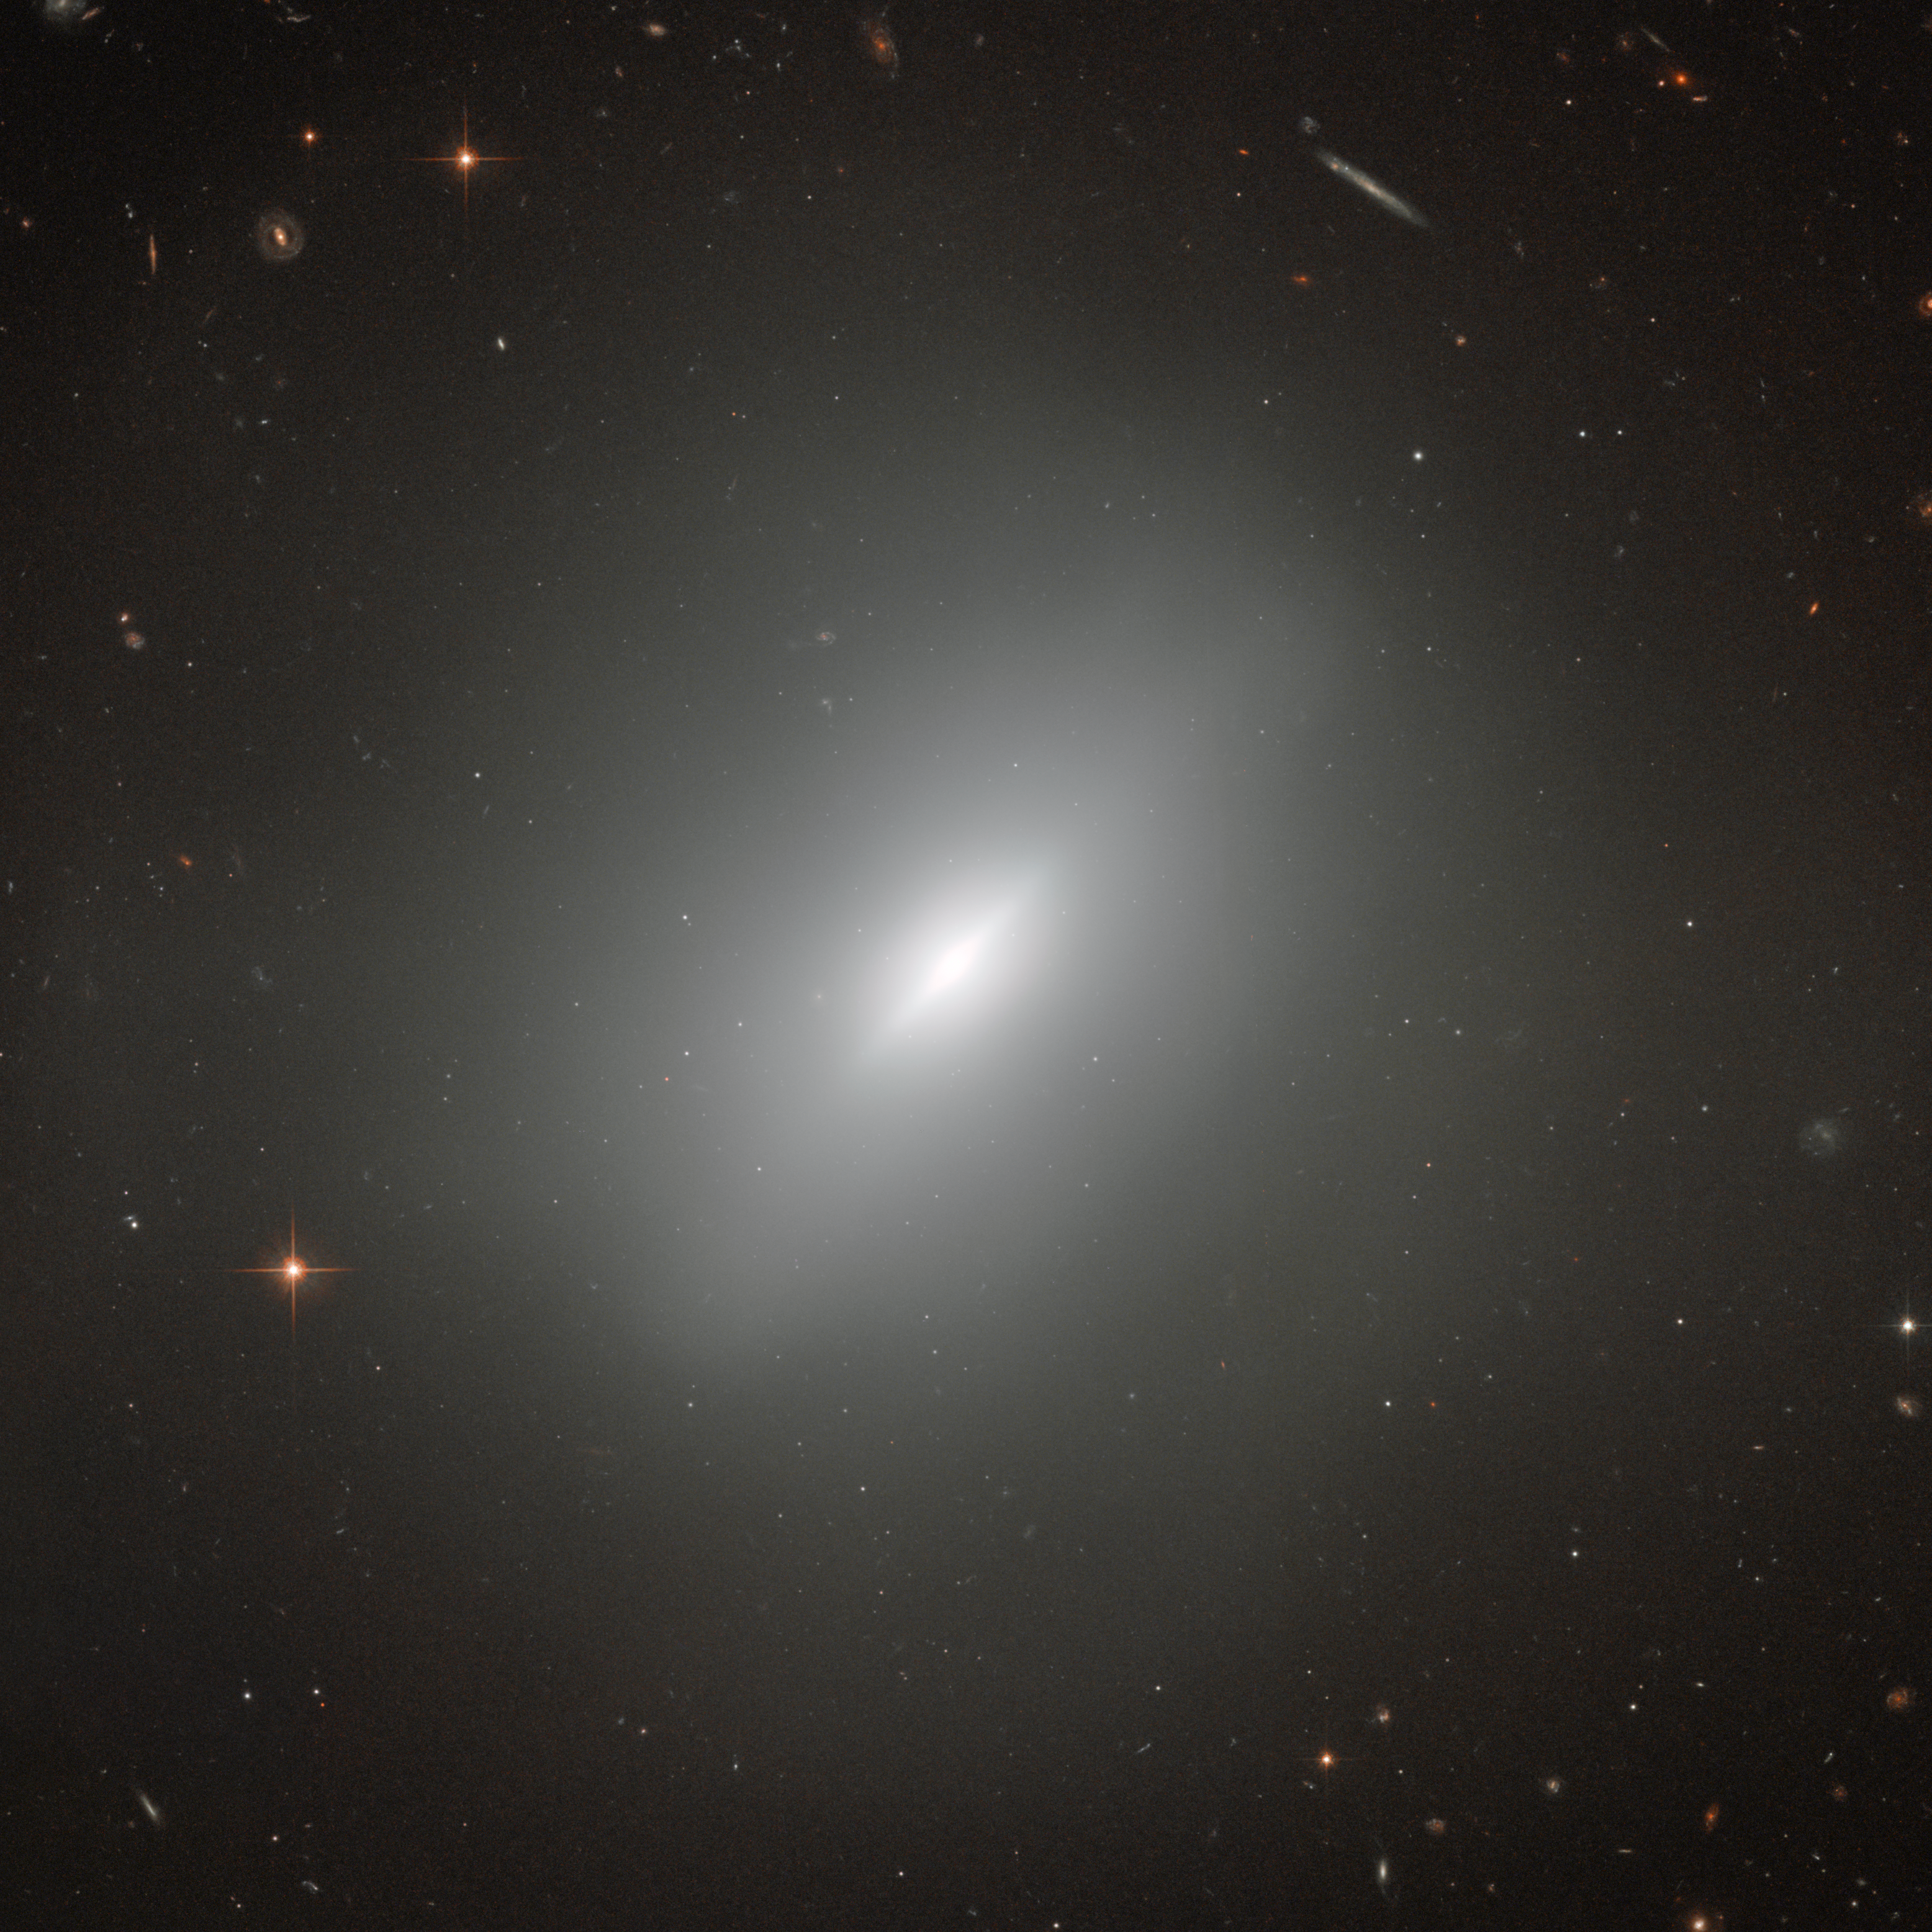

A young elliptical

At the centre of this amazing image is the elliptical galaxy NGC 3610. Surrounding the galaxy are a wealth of other galaxies of all shapes. There are spiral galaxies, galaxies with a bar in their central regions, distorted galaxies and elliptical galaxies, all visible in the background. In fact, almost every bright dot in this image is a galaxy — the few foreground stars are clearly distinguishable due to the diffraction spikes that overlay their images.

NGC 3610 is of course the most prominent object in this image — and a very interesting one at that! Discovered in 1793 by William Herschel, it was later found that this elliptical galaxy contains a disc. This is very unusual, as discs are one of the main distinguishing features of a spiral galaxy. And NGC 3610 even hosts a memarkable bright disc.

The reason for the peculiar shape of NGC 3610 stems from its formation history. When galaxies form, they usually resemble our galaxy, the Milky Way, with flat discs and spiral arms where star formation rates are high and which are therefore very bright. An elliptical galaxy is a much more disordered object which results from the merging of two or more disc galaxies. During these violent mergers most of the internal structure of the original galaxies is destroyed. The fact that NGC 3610 still shows some structure in the form of a bright disc implies that it formed only a short time ago. The galaxy’s age has been put at around four billion years and it is an important object for studying the early stages of evolution in elliptical galaxies.

Credit: ESA/Hubble & NASA, Acknowledgement: Judy Schmidt (Geckzilla)